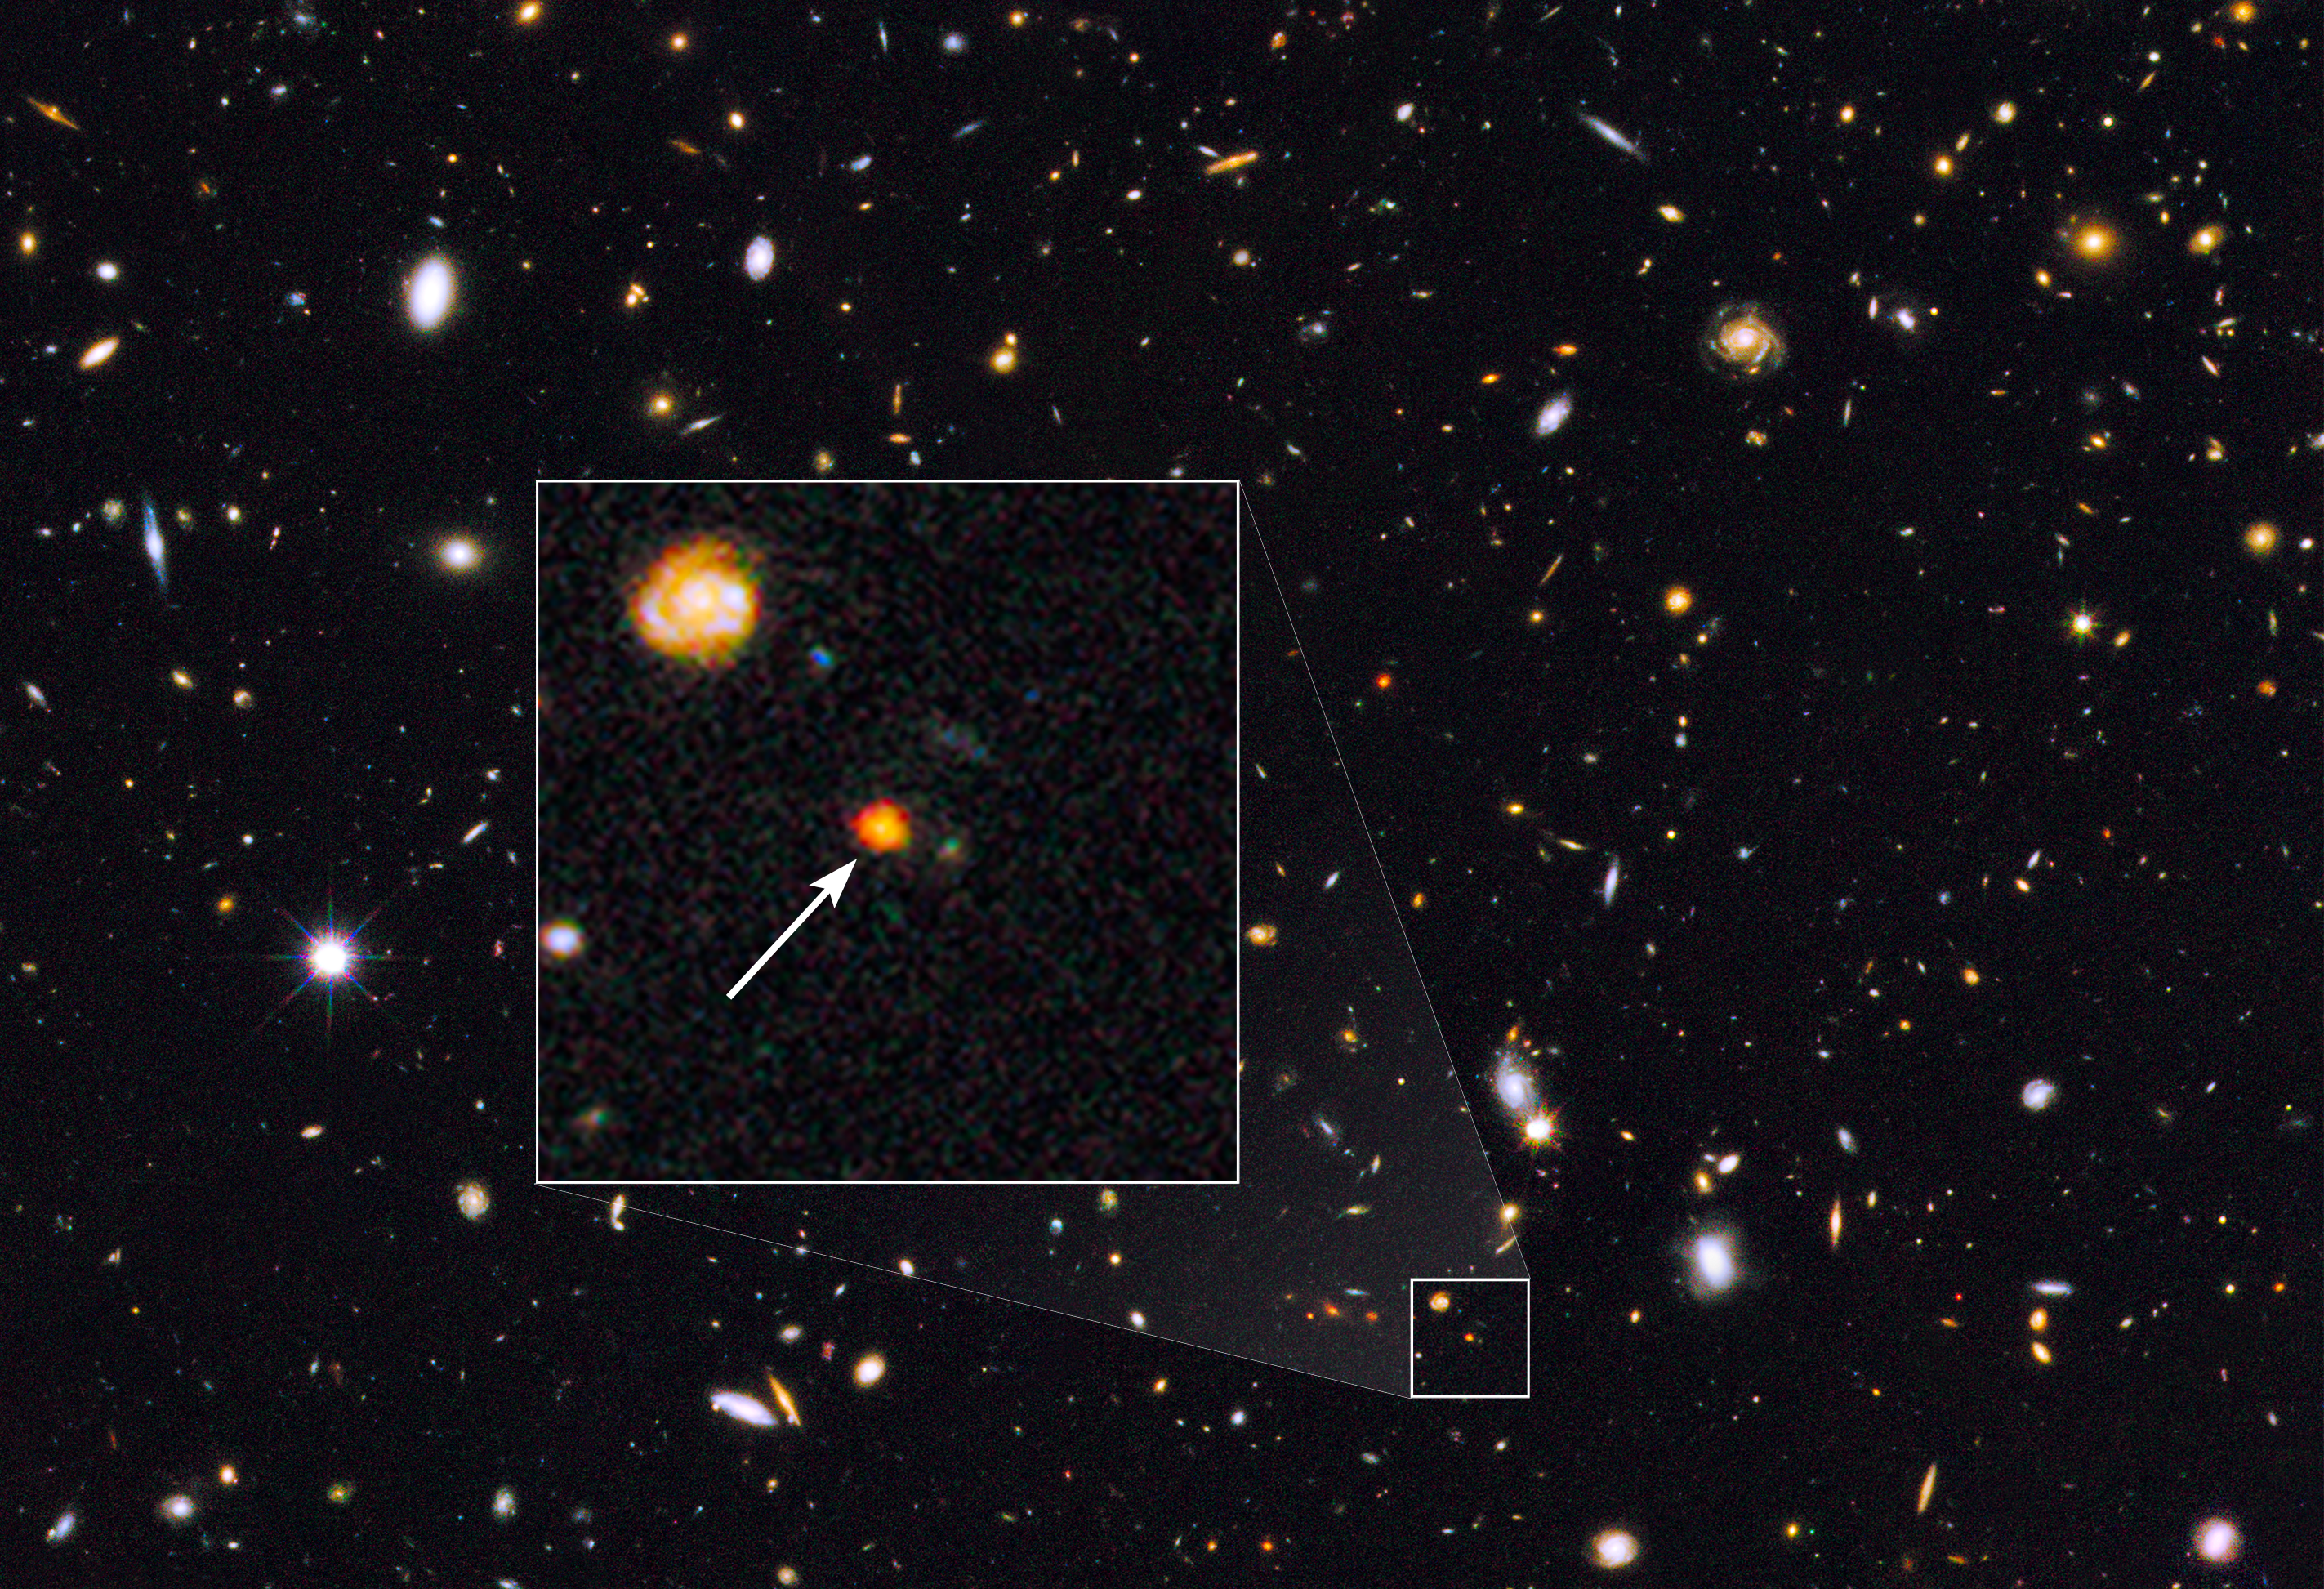

Distant galaxy core in the Hubble GOODS North field

This image shows observations of a newly discovered galaxy core dubbed GOODS-N-774, taken by the NASA/ESA Hubble Space Telescope's Wide Field Camera 3 and Advanced Camera for Surveys. The core is marked by the box inset, overlaid on a section of the Hubble GOODS-N, or GOODS North, field (Great Observatories Origins Deep Survey).

This is the first time that a galaxy has been spotted in this stage of formation — a very early stage where the dense galactic core is still furiously churning out newborn stars. GOODS-N-774 is seen here as it appeared eleven billion years ago, just three billion years after the Big Bang.

After this stage, galaxies like this are thought to build up from the inside out, expanding outwards via mergers with other smaller galaxies to become the giant quiescent elliptical galaxies we see in the nearby Universe.

Credit: NASA, ESA, and E. Nelson (Yale University, USA)